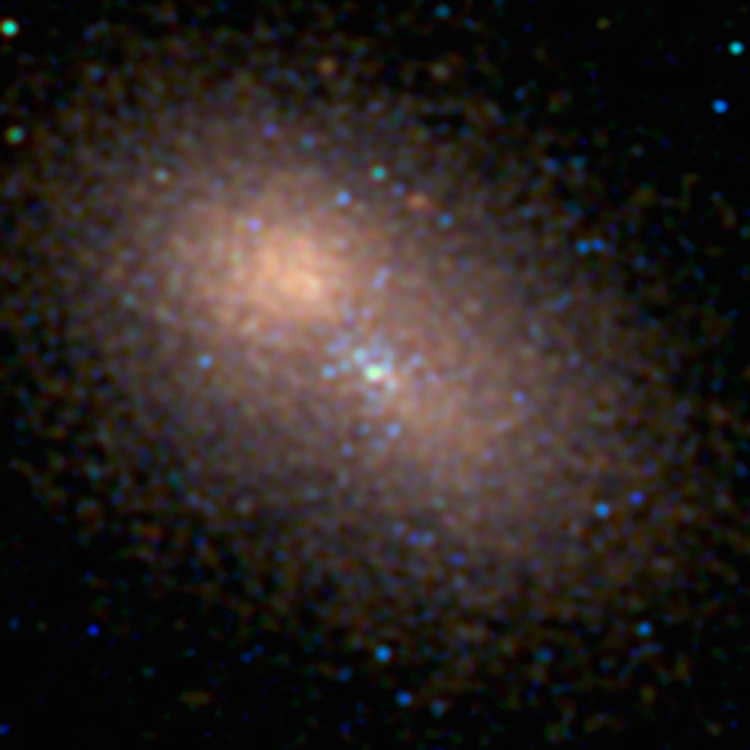

Centre of M31

This Hubble Space Telescope image centres on the 100-million-solar-mass black hole at the hub of the neighboring spiral galaxy M31, or the Andromeda galaxy, one of the few galaxies outside the Milky Way visible to the naked eye and the only other giant galaxy in the Local Group.

This is the sharpest visible-light image ever made of the nucleus of an external galaxy.

Credit: NASA, ESA, and T. Lauer (National Optical Astronomy Observatory)